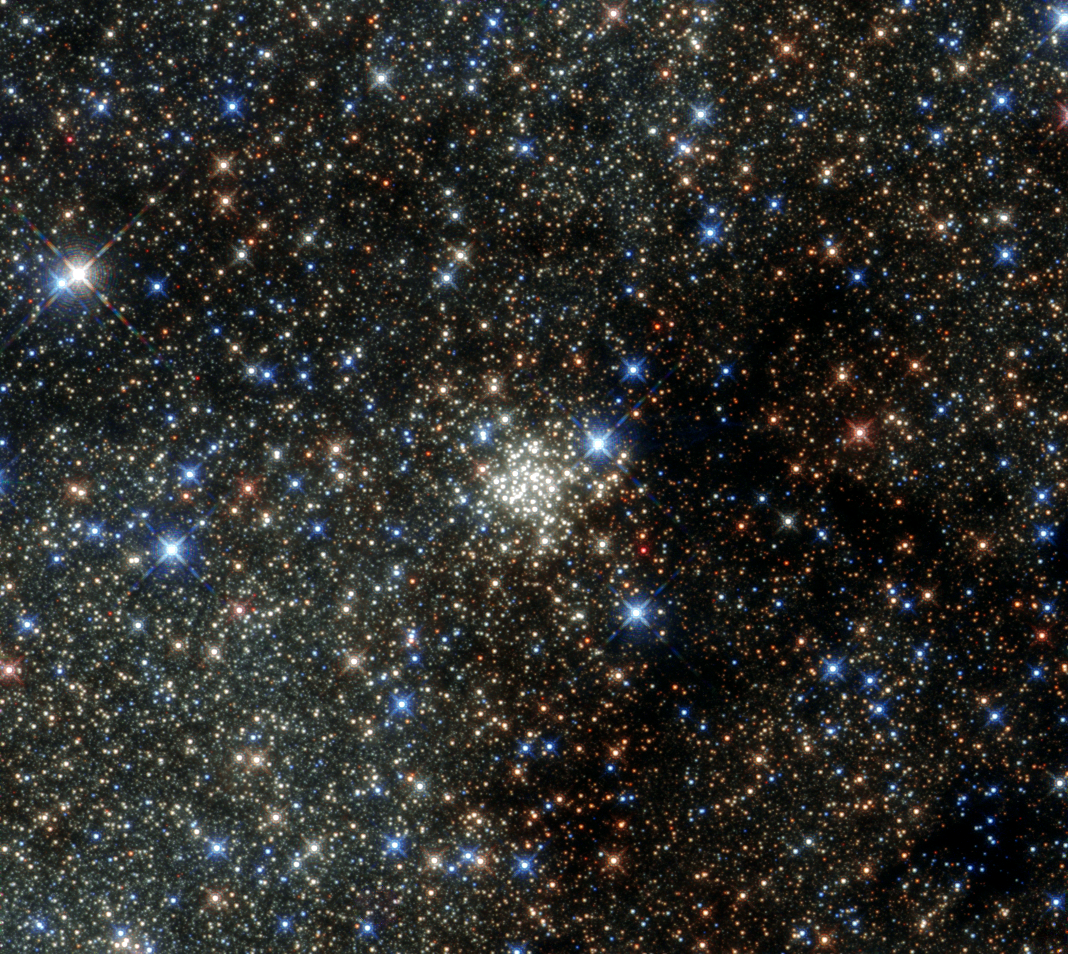

The most crowded place in the Milky Way

This new NASA/ESA Hubble Space Telescope image presents the Arches Cluster, the densest known star cluster in the Milky Way. It is located about 25 000 light-years from Earth in the constellation of Sagittarius (The Archer), close to the heart of our galaxy, the Milky Way. It is, like its neighbour the Quintuplet Cluster, a fairly young astronomical object at between two and four million years old.

The Arches cluster is so dense that in a region with a radius equal to the distance between the Sun and its nearest star there would be over 100 000 stars!

At least 150 stars within the cluster are among the brightest ever discovered in the the Milky Way. These stars are so bright and massive, that they will burn their fuel within a short time, on a cosmological scale, just a few million years, and die in spectacular supernova explosions. Due to the short lifetime of the stars in the cluster, the gas between the stars contains an unusually high amount of heavier elements, which were produced by earlier generations of stars.

Despite its brightness the Arches Cluster cannot be seen with the naked eye. The visible light from the cluster is completely obscured by gigantic clouds of dust in this region. To make the cluster visible astronomers have to use detectors which can collect light from the X-ray, infrared, and radio bands, as these wavelengths can pass through the dust clouds. This observation shows the Arches Cluster in the infrared and demonstrates the leap in Hubble’s performance since its 1999 image of same object.

Credit: NASA & ESA